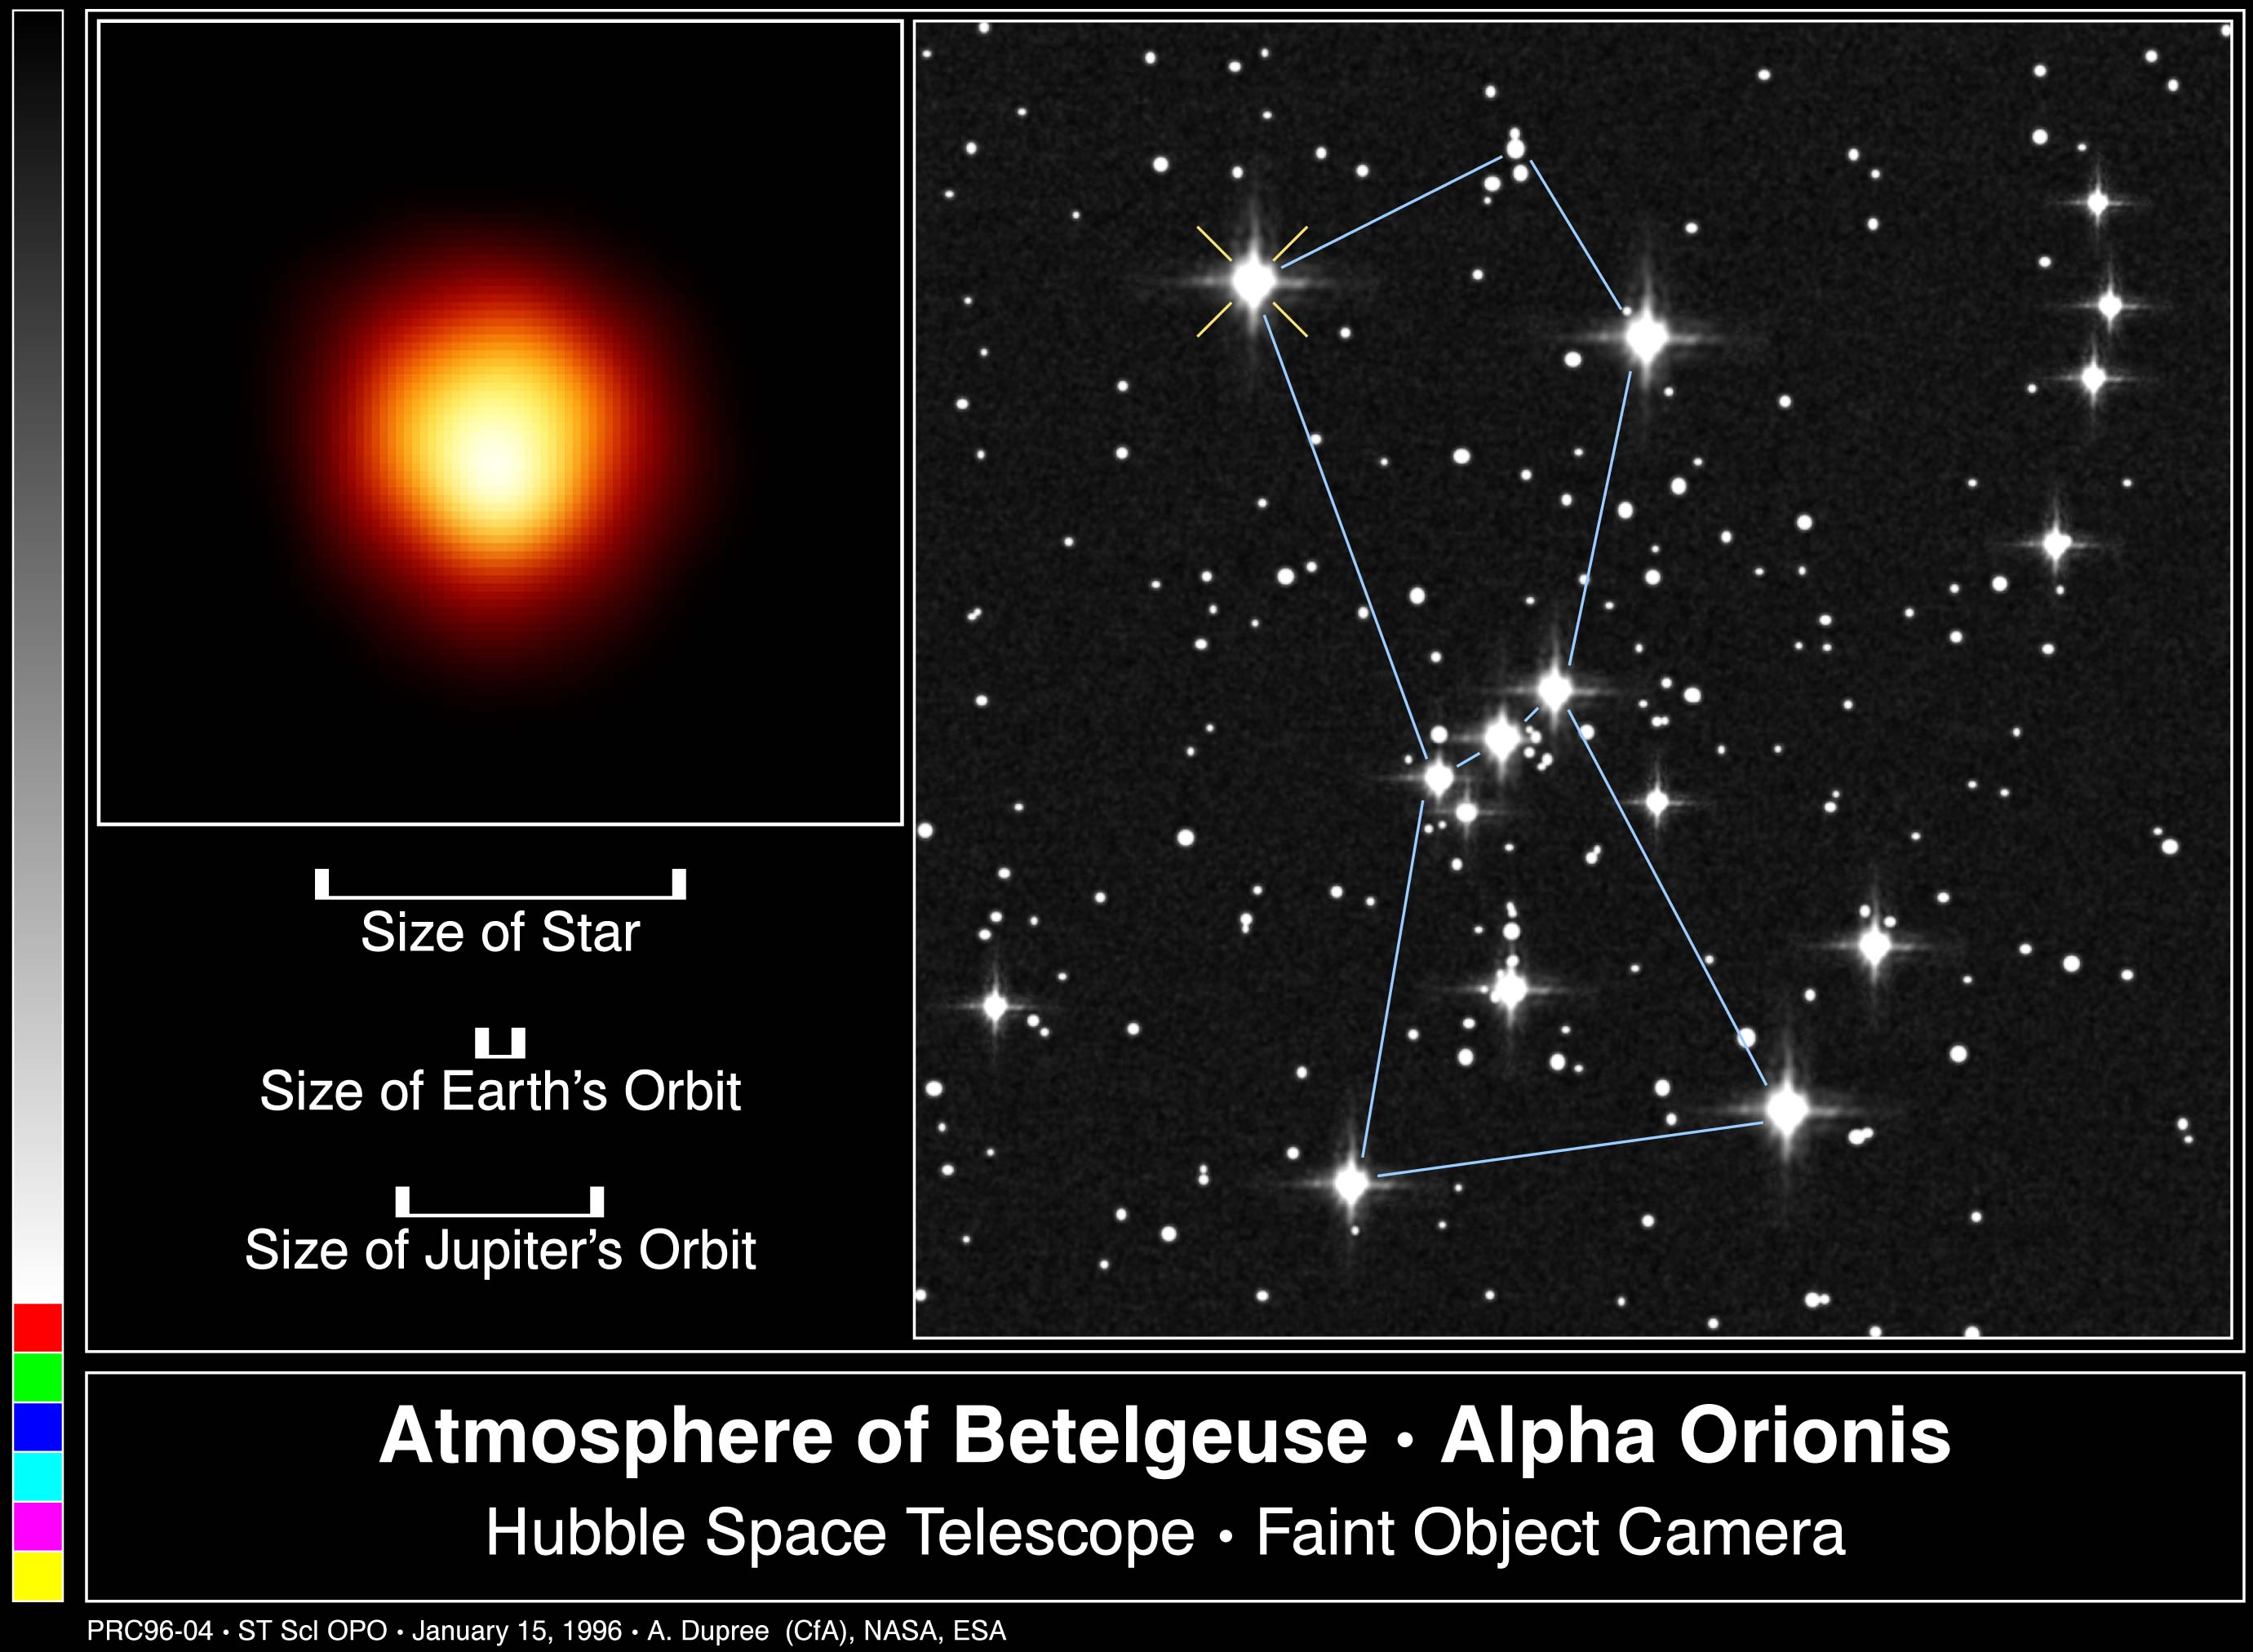

The Atmosphere of Betelgeuse

This is the first direct image of a star other than the Sun, made with the Hubble Space Telescope. Called Alpha Orionis, or Betelgeuse, it is a red supergiant star marking the shoulder of the winter constellation Orion the Hunter (diagram at right).

Credit: Andrea Dupree (Harvard-Smithsonian CfA), Ronald Gilliland (STScI), NASA and ESA